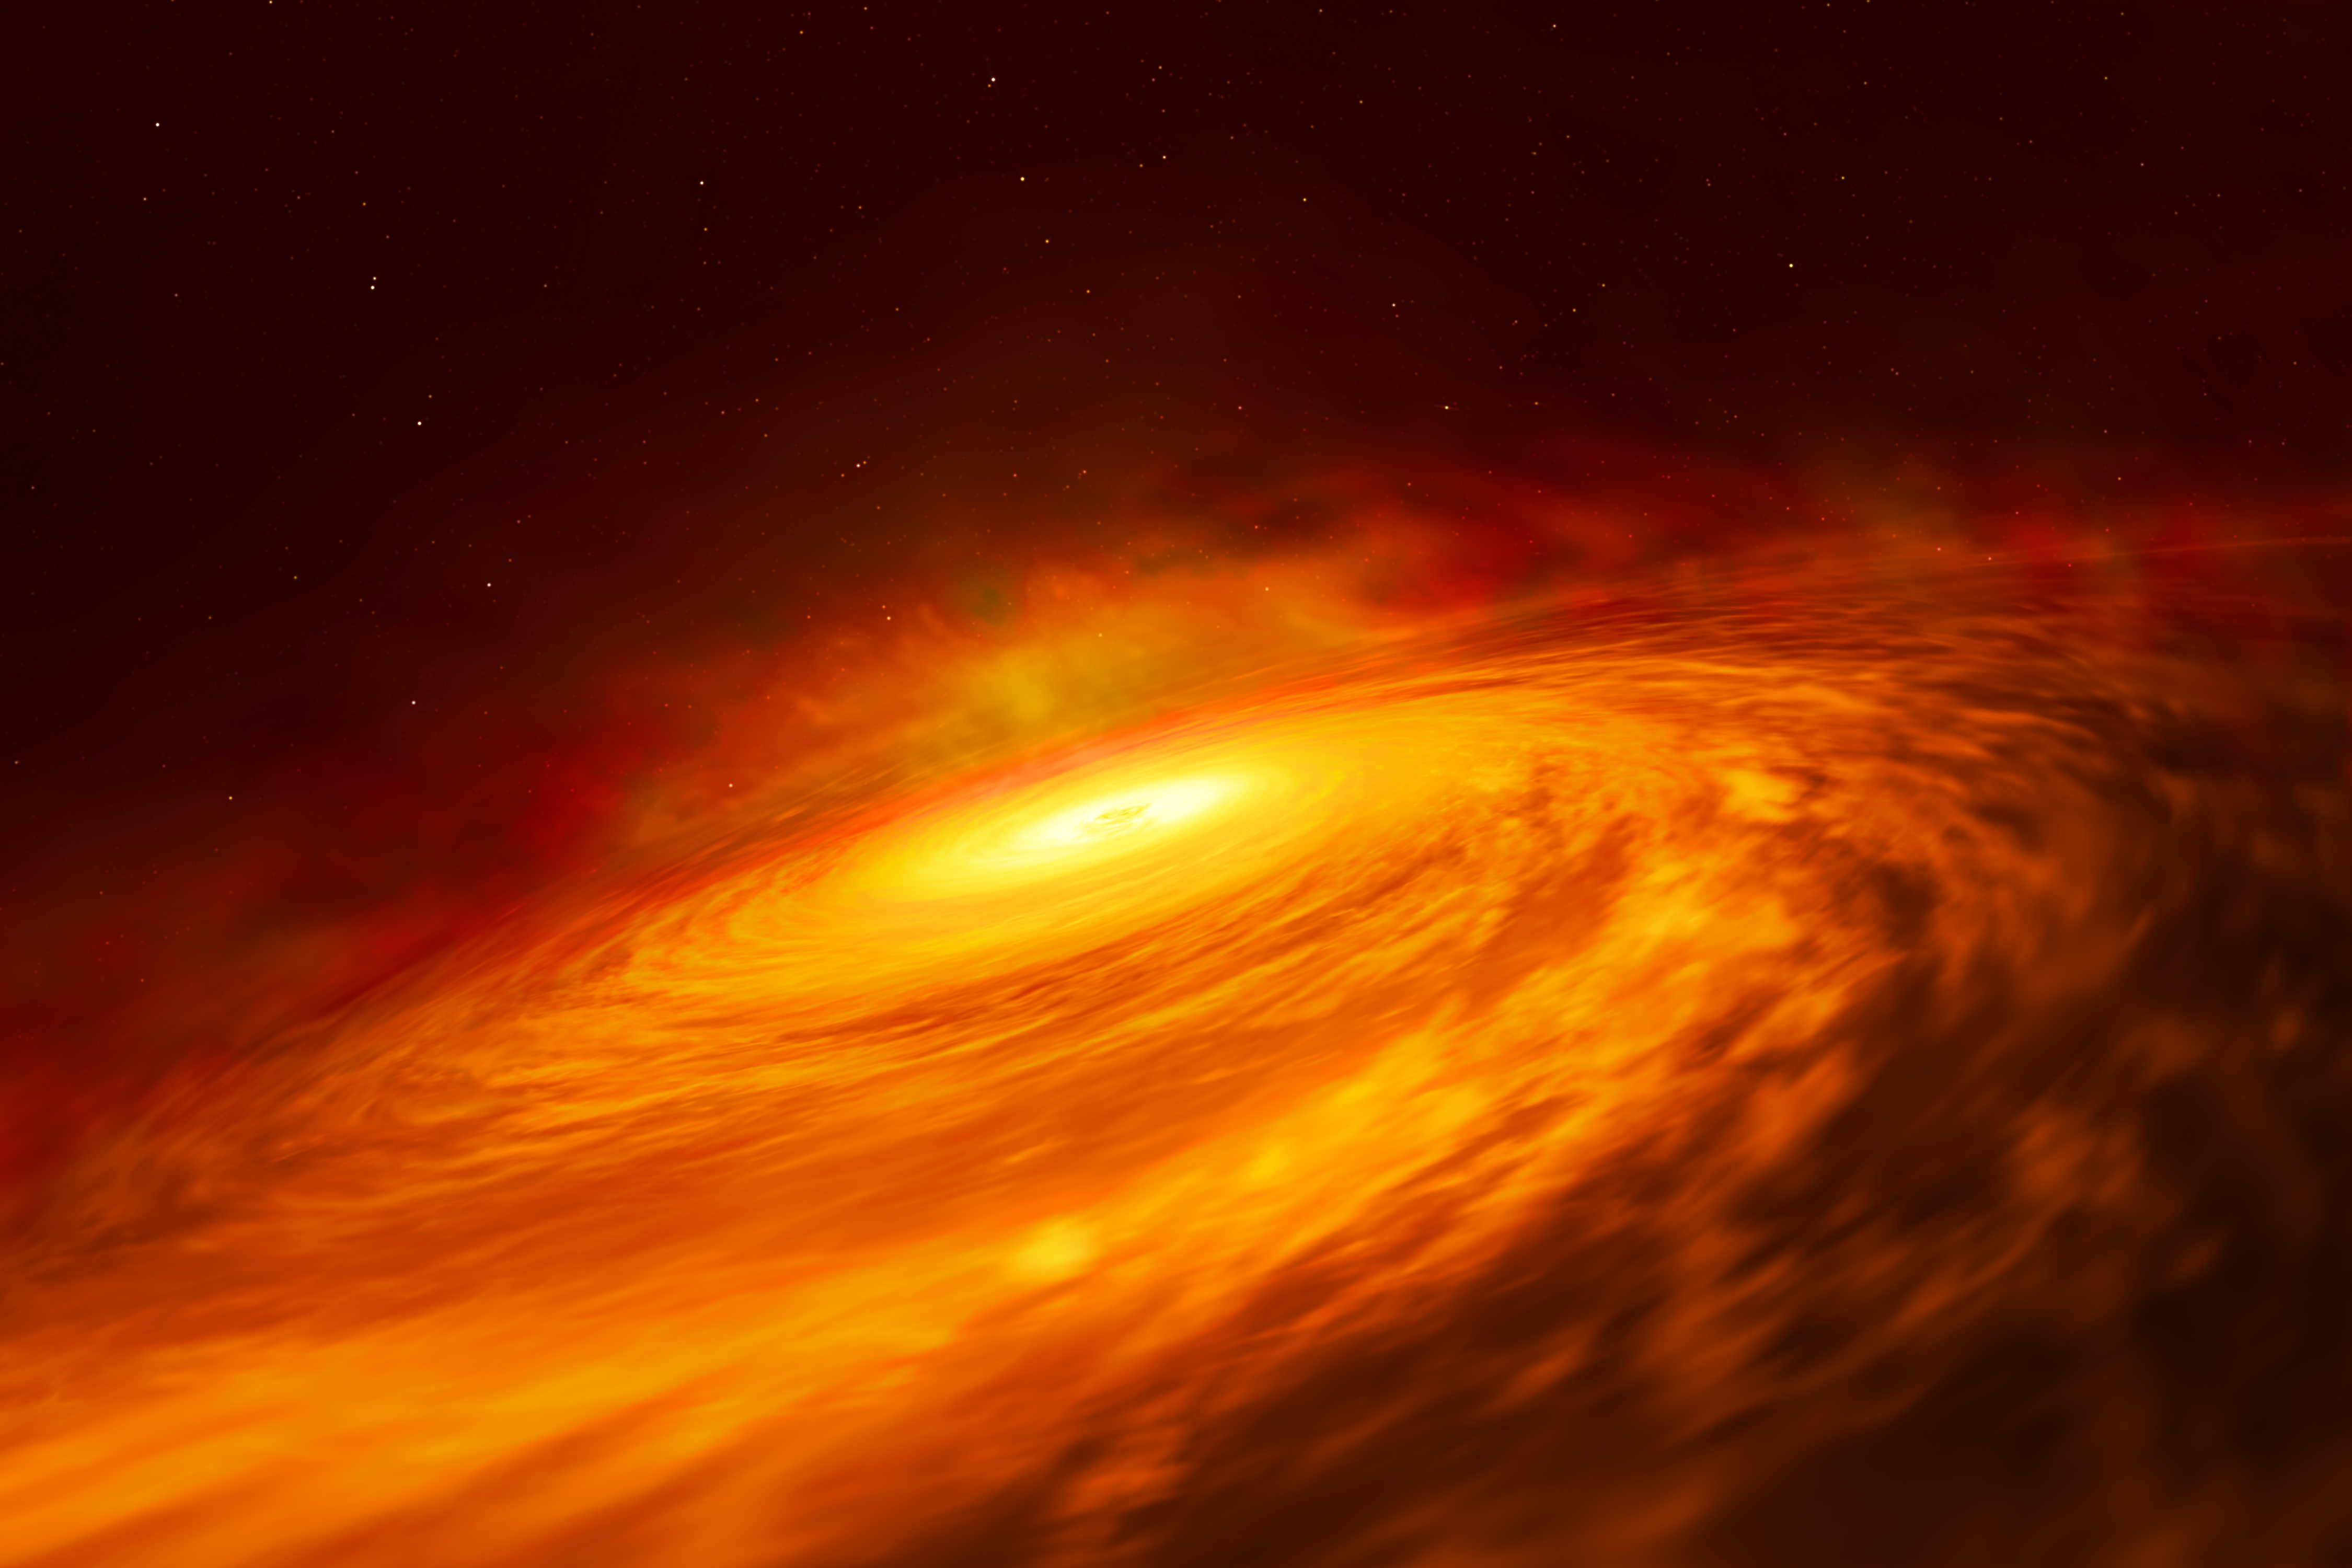

Artist’s impression of NGC 3147 black hole disc

Artist’s impression of the peculiar thin disc of material circling a supermassive black hole at the heart of the spiral galaxy NGC 3147, located 130 million light-years away.

Credit: ESA/Hubble, M. Kornmesser